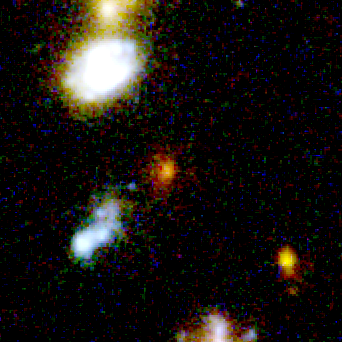

Farthest Supernova Ever - SN 1997ff

This photo is a close-up view of that region. The white arrow points to the exploding star's home galaxy, a faint elliptical. Its redness is due to the billions of old stars residing there.

Credit: NASA/ESA, Adam Riess ( Space Telescope Science Institute, Baltimore, MD)